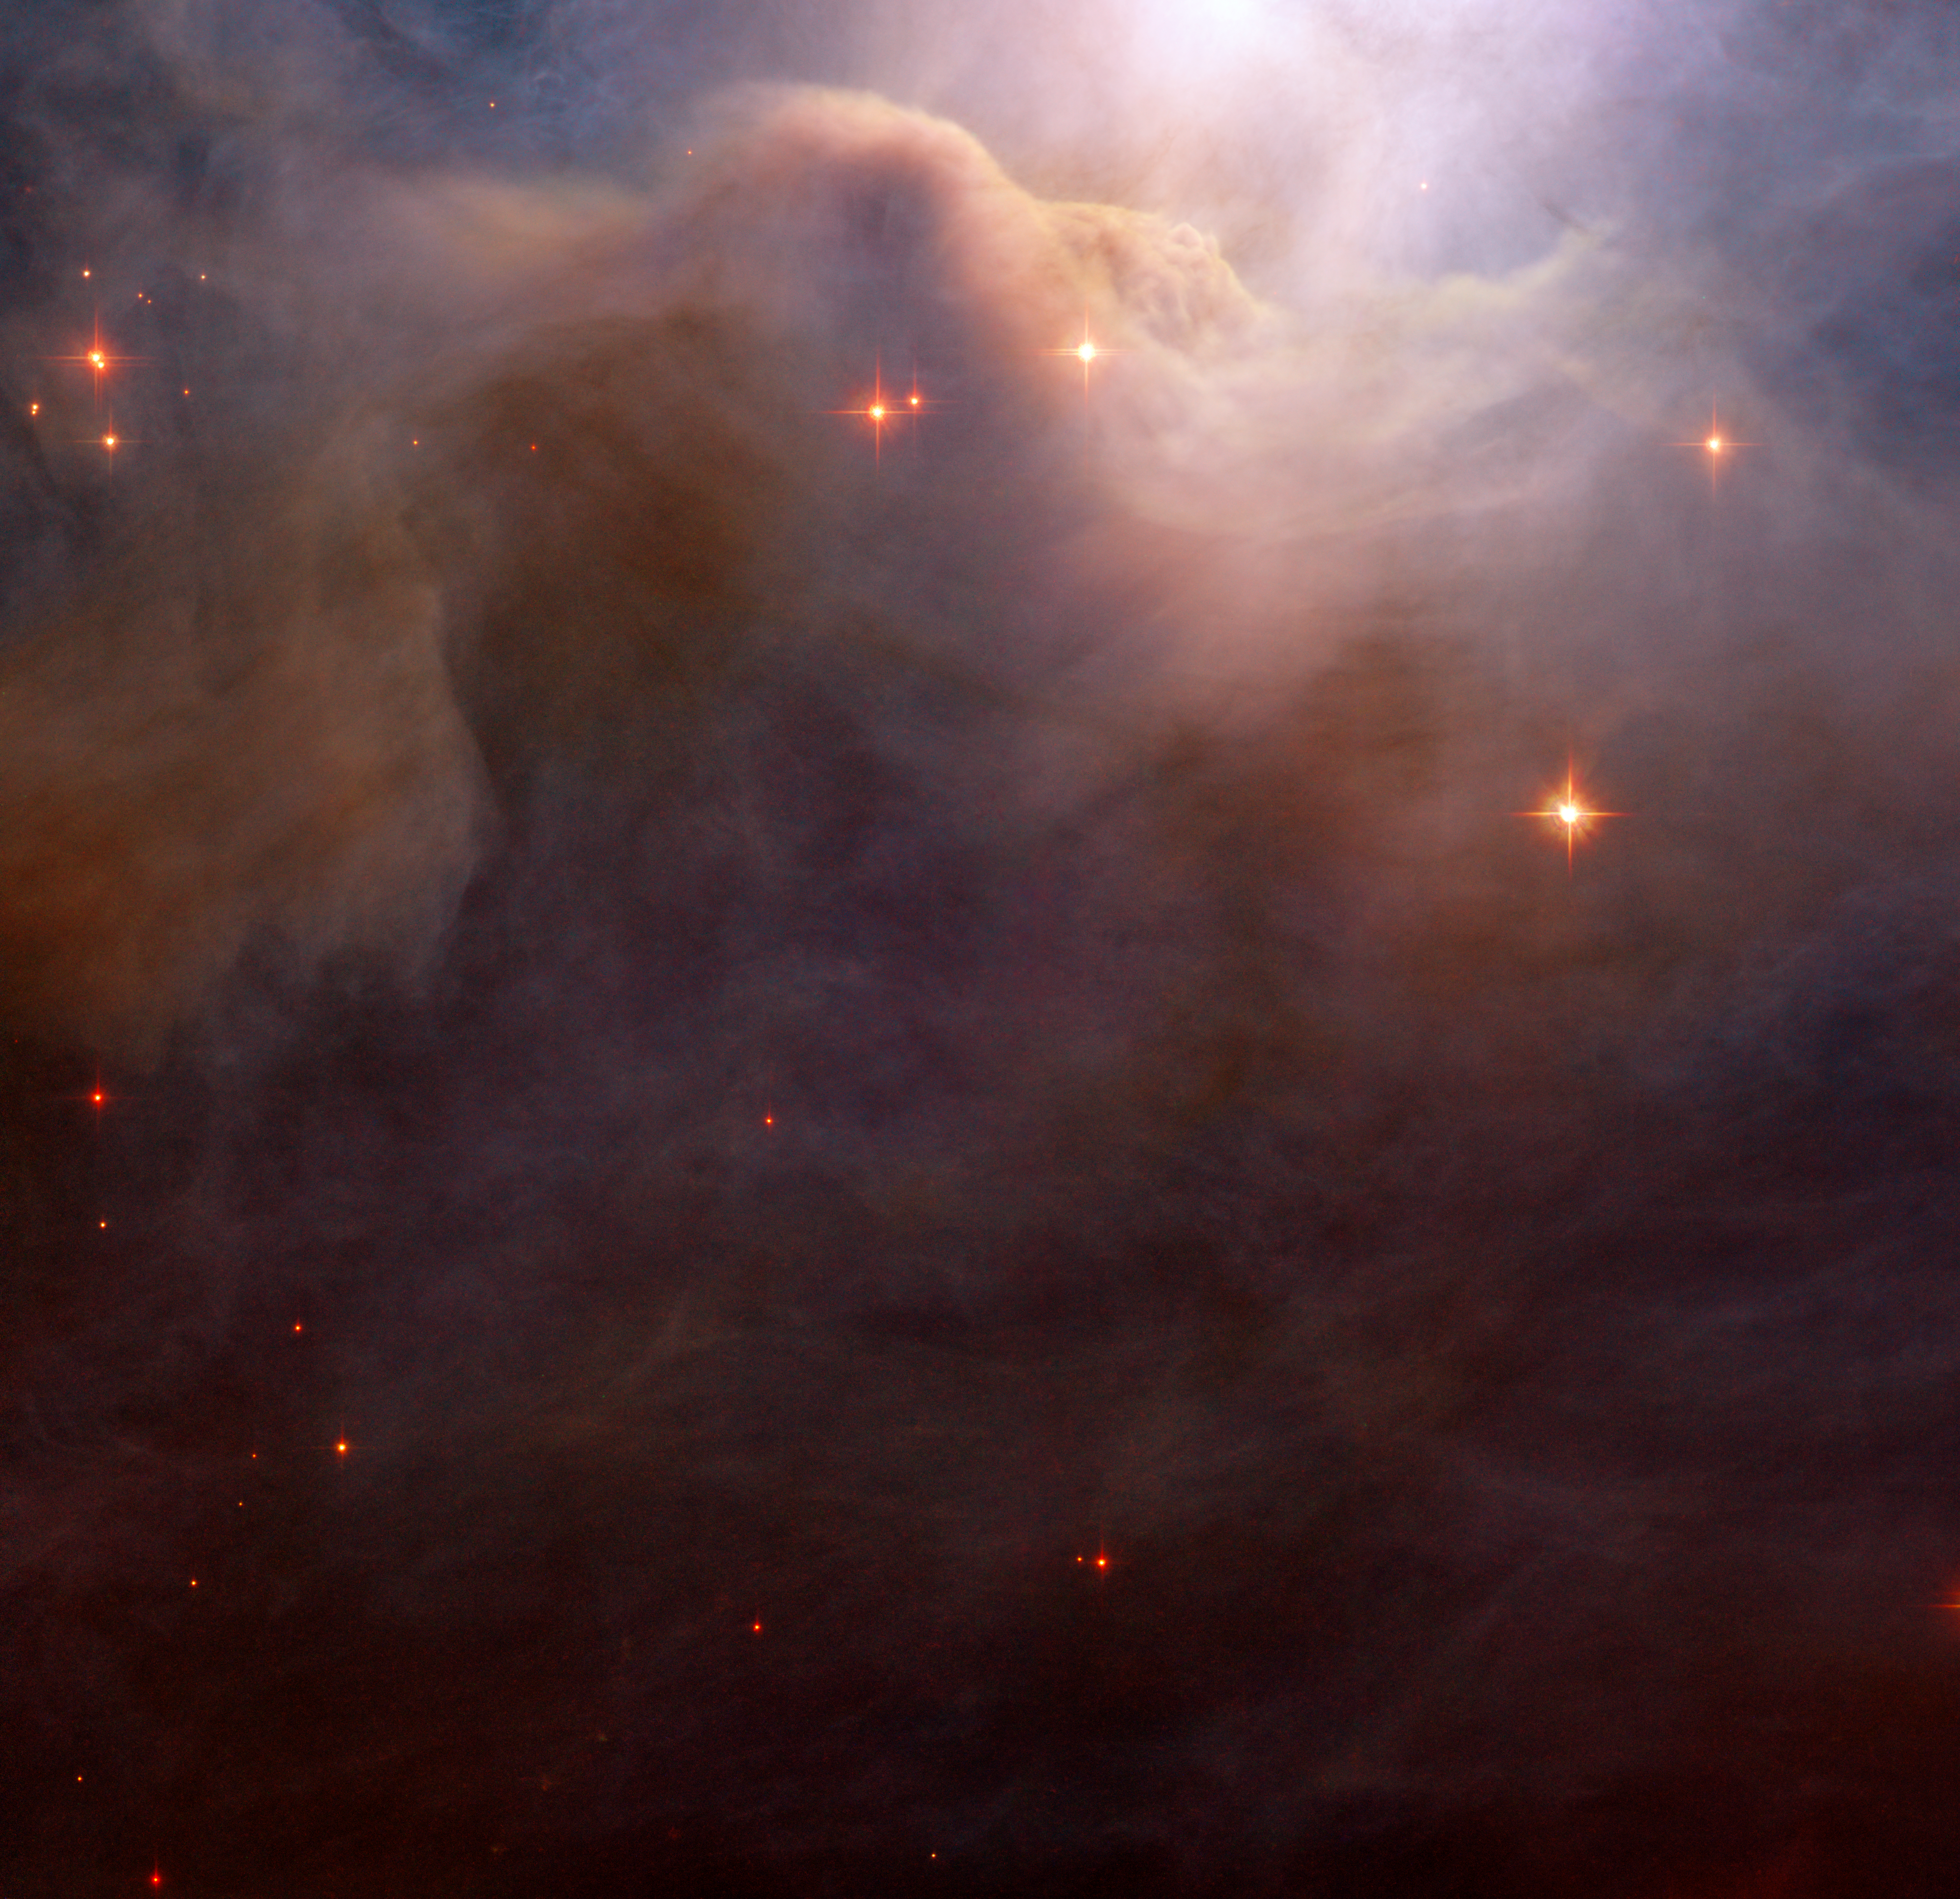

Blushing dusty nebula

This close-up of an area in the northwest region of the large Iris Nebula seems to be clogged with cosmic dust. With bright light from the nearby star HD 200775 illuminating it from above, the dust resembles thick mounds of billowing cotton. It is actually made up of tiny particles of solid matter, with sizes from ten to a hundred times smaller than those of the dust grains we find at home. Both background and foreground stars are dotted throughout the image. Researchers studying the object are particularly interested in the region to the left and slightly above centre in the image, where dusty filaments appear redder than is expected.

North is down, East is right. The field of view is 3.3 arcminutes. The image is a composite of four images obtained through blue, green, near-infrared and H-alpha filters.

Credit: NASA & ESA